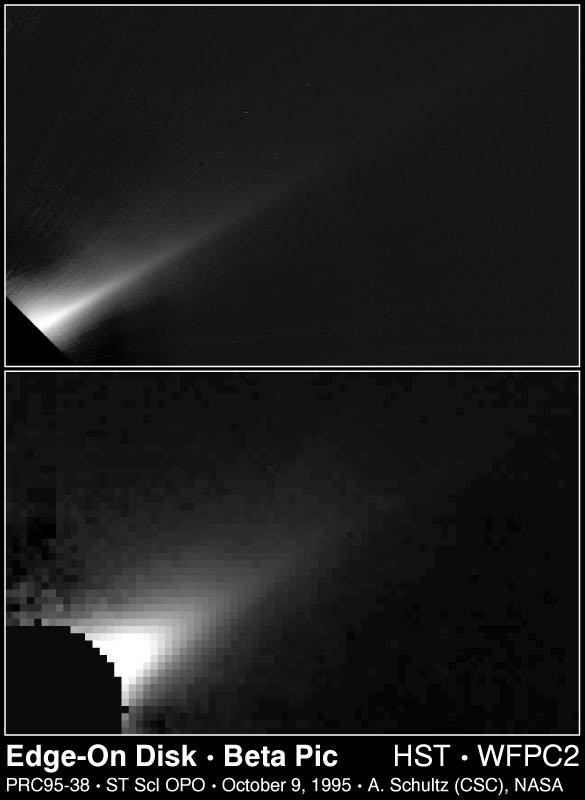

Beta Pictoris Edge-On

Top Panel

This Hubble Space Telescope image of a portion of a vast dust disk around the star Beta Pictoris shows that the disk is thinner than thought previously. Estimates based on the Hubble image place the disk's thickness as no more than one billion miles (600 million kilometers), or about 1/4 previous estimates from ground-based observations.

Credit: Al Schultz (CSC/STScI) and NASA

Bottom Panel

For comparison the disk appears four times thicker in a ground-based image of Beta Pictoris due to the limitation of atmospheric seeing. This red-light image (approximately 7, 000 Angstroms) image was obtained at the Mauna Kea Observatory, Hawaii, on the 2.2-meter telescope.

Credit: Paul Kalas (University of Hawaii 2.2-m telescope, Mauna Kea)

Credit: Al Schultz (CSC/STScI), Paul Kalas (University of Hawaii 2.2-m telescope, Mauna Kea) and NASA/ESA